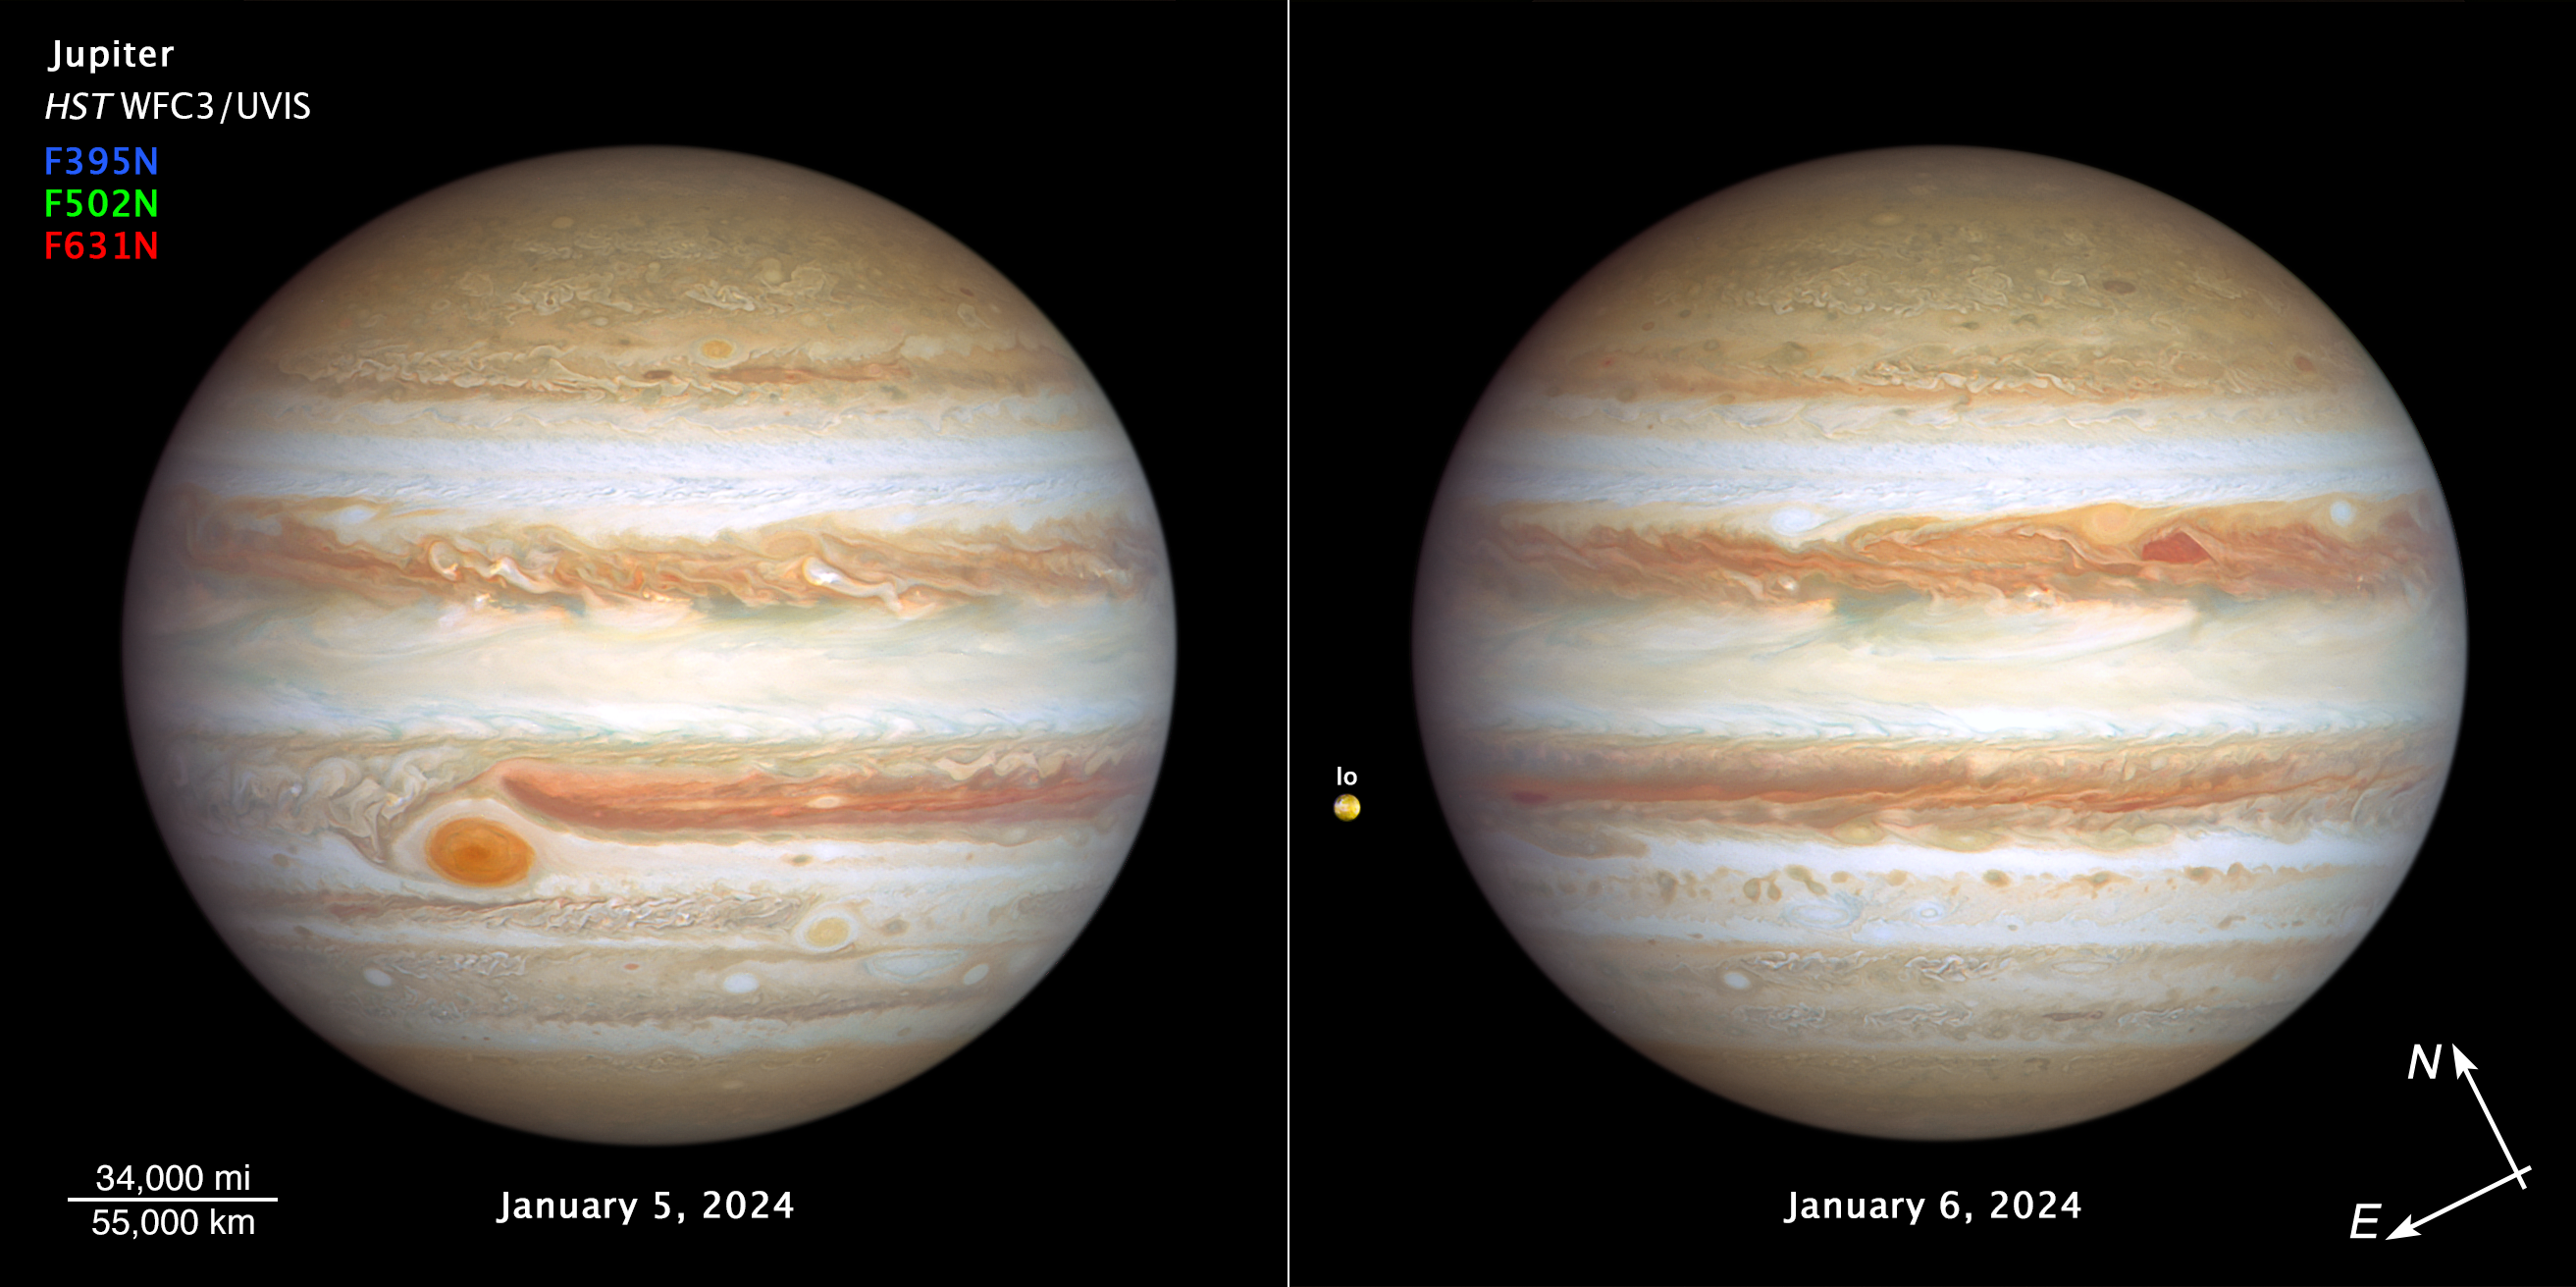

Hubble’s two new views of Jupiter (January 2024, compass image)

The giant planet Jupiter, in all its banded glory, is revisited by the NASA/ESA Hubble Space Telescope in these latest images taken on 5–6 January 2024, that capture both sides of the planet. Hubble monitors Jupiter and the other outer Solar System planets every year under the Outer Planet Atmospheres Legacy programme (OPAL). This is because these large worlds are shrouded in clouds and hazes stirred up by violent winds, leading to a kaleidoscope of ever-changing weather patterns.

[left image] - Big enough to swallow Earth, the classic Great Red Spot stands out prominently in Jupiter's atmosphere. To its lower right, at a more southerly latitude, is a feature sometimes dubbed Red Spot Jr. This anticyclone was the result of storms merging in 1998 and 2000, and it first appeared red in 2006 before returning to a pale beige in subsequent years. This year it is somewhat redder again. The source of the red coloration is unknown but may involve a range of chemical compounds: sulphur, phosphorus or organic material. Staying in their lanes, but moving in opposite directions, Red Spot Jr. passes the Great Red Spot about every two years. Another small red anticyclone appears in the far north.

[right image] - Storm activity also appears in the opposite hemisphere. A pair of storms: a deep red cyclone and a reddish anticyclone, appear to be next to each other at right of centre. They look so red that at first glance, it looks like Jupiter skinned a knee. These storms are rotating in opposite directions, indicating an alternating pattern of high- and low-pressure systems. For the cyclone, there’s an upwelling on the edges with clouds descending in the middle causing a clearing in the atmospheric haze.

The storms are expected to bounce past each other because their opposing clockwise and counterclockwise rotations make them repel each other.

Toward the left edge of the image is the innermost Galilean moon, Io — the most volcanically active body in the Solar System, despite its small size (only slightly larger than Earth's moon). Hubble resolves volcanic outflow deposits on the surface. Hubble's sensitivity to blue and violet wavelengths clearly reveals interesting surface features.

Credit: NASA, ESA, J. DePasquale (STScI), A. Simon (NASA-GSFC)